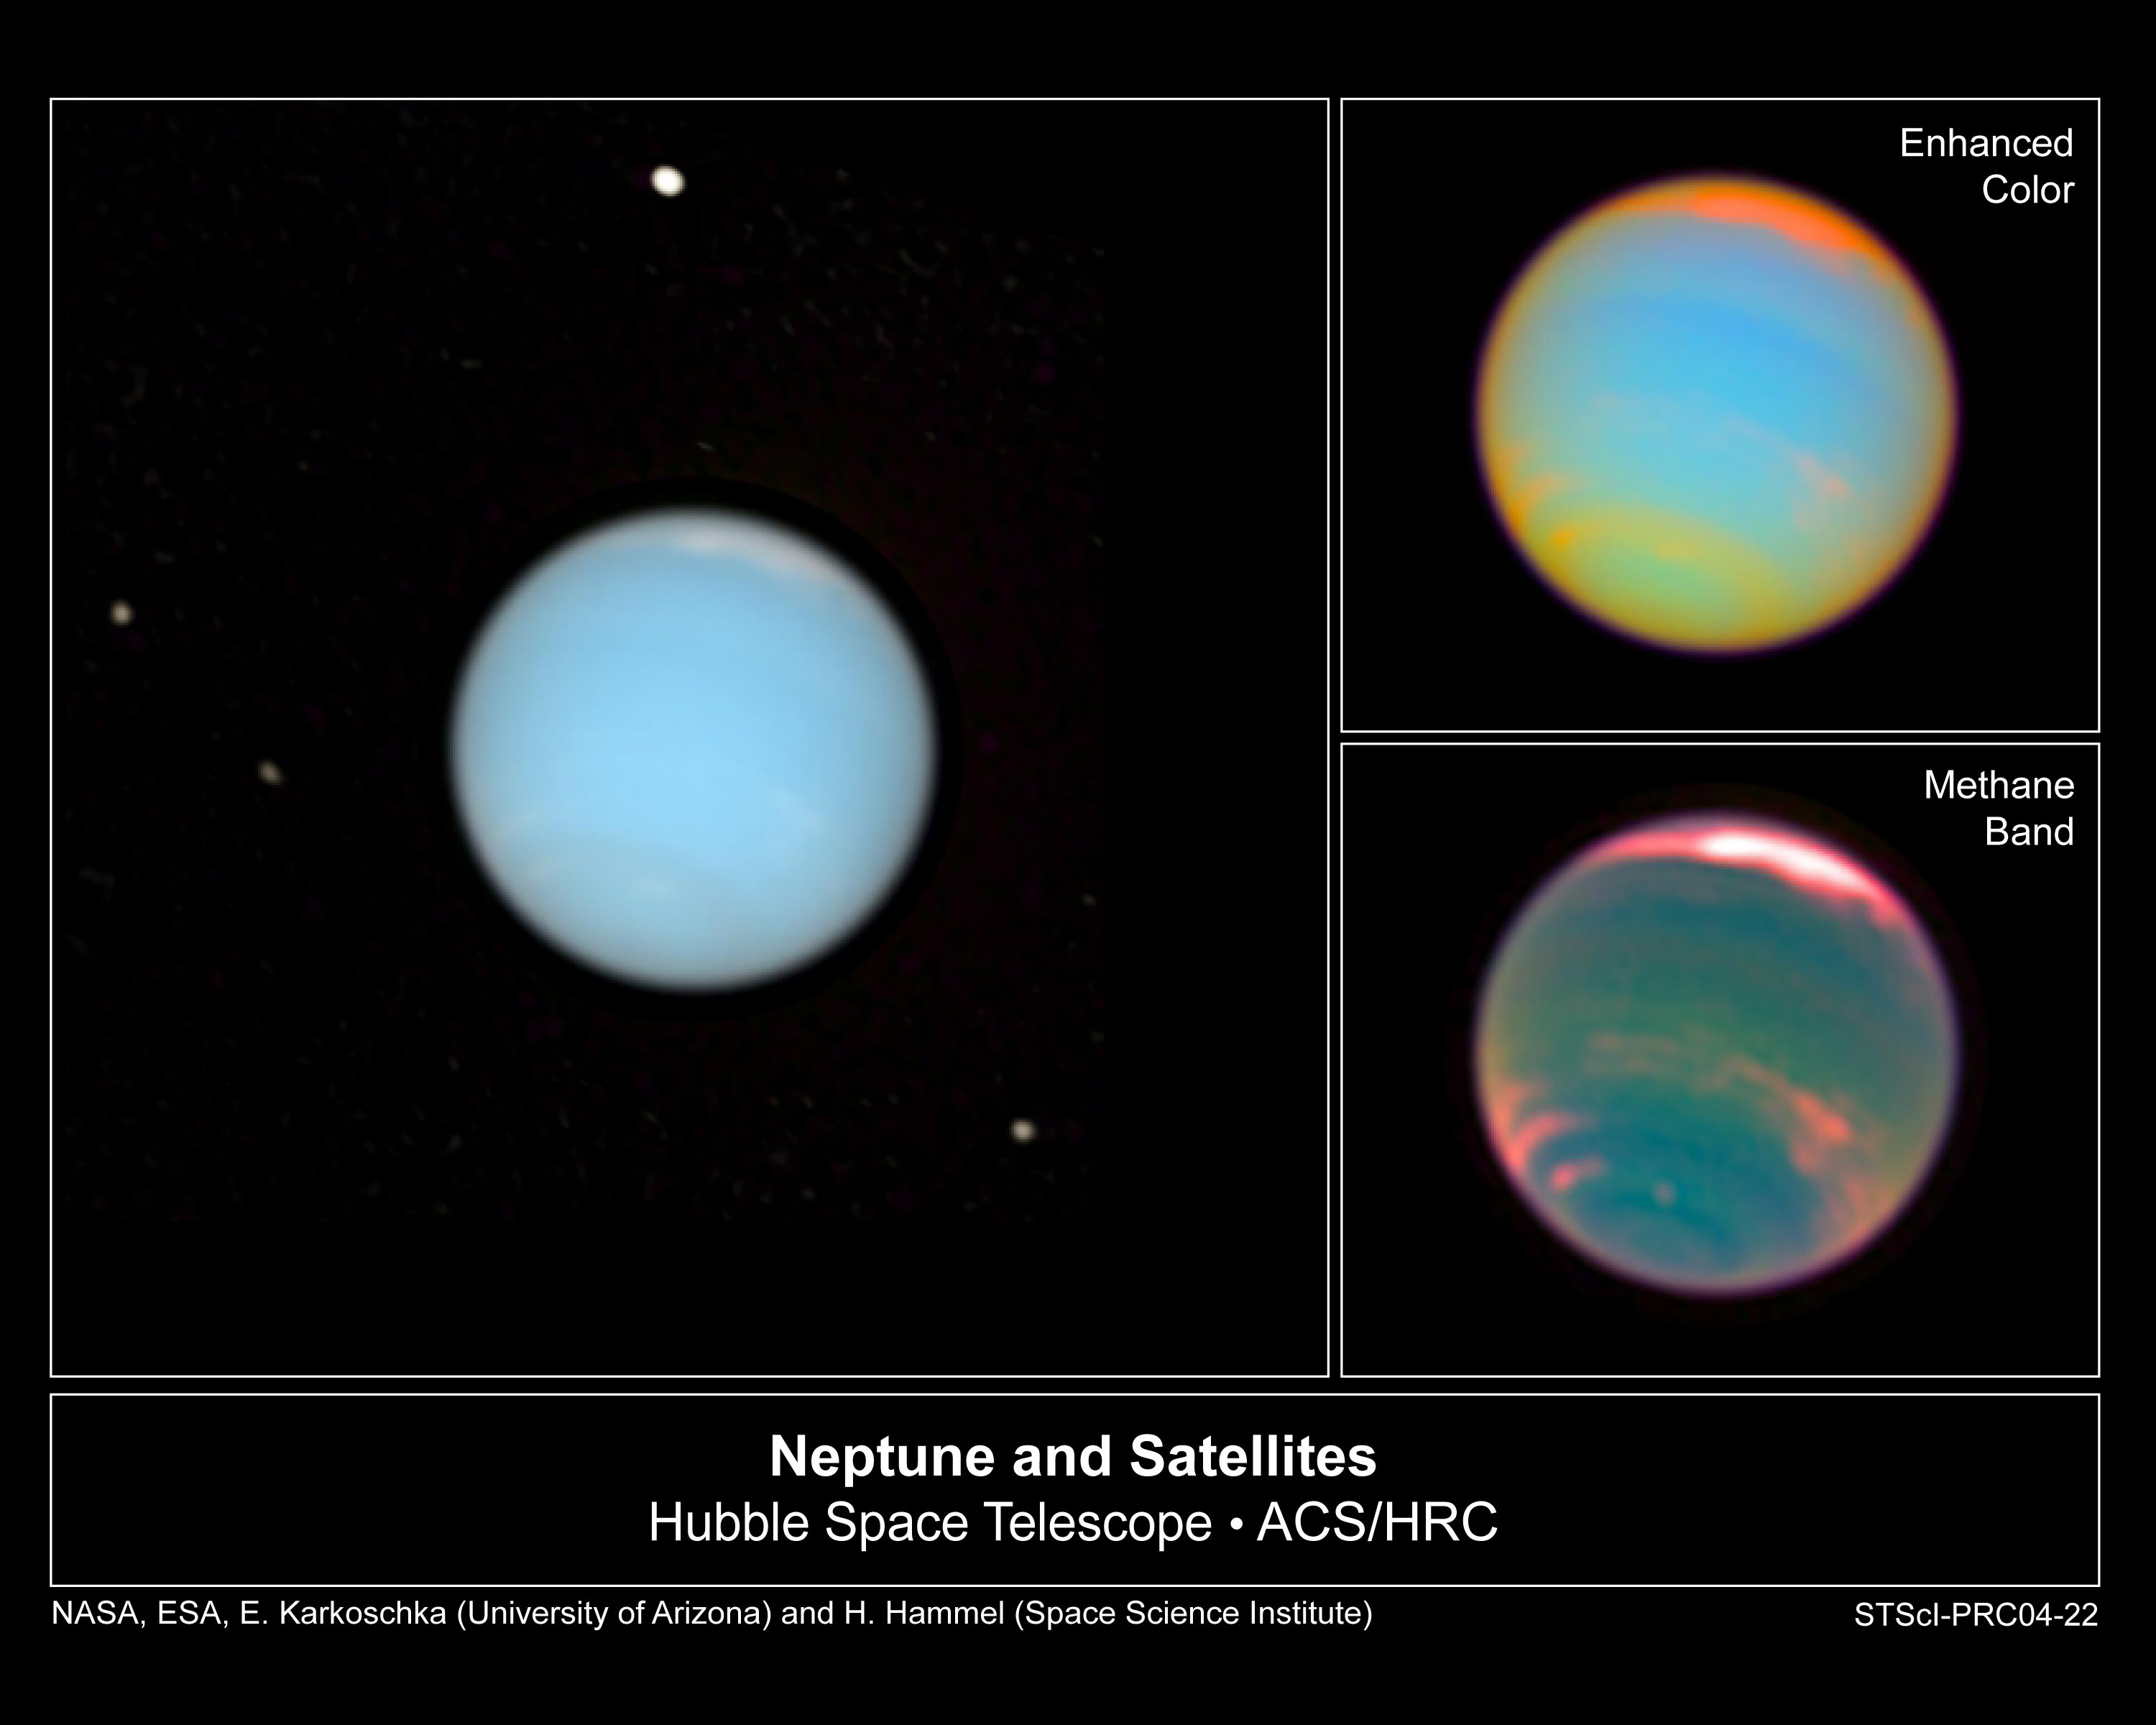

Hubble Makes Movie of Neptune's Dynamic Atmosphere

New NASA/ESA Hubble Space Telescope images of the distant planet Neptune show a dynamic atmosphere and capture the fleeting orbits of its satellites. The images have been assembled into a time-lapse movie revealing the orbital motion of the satellites.

Credit: NASA, ESA, E. Karkoschka (University of Arizona), and H.B. Hammel (Space Science Institute, Boulder, Colorado)